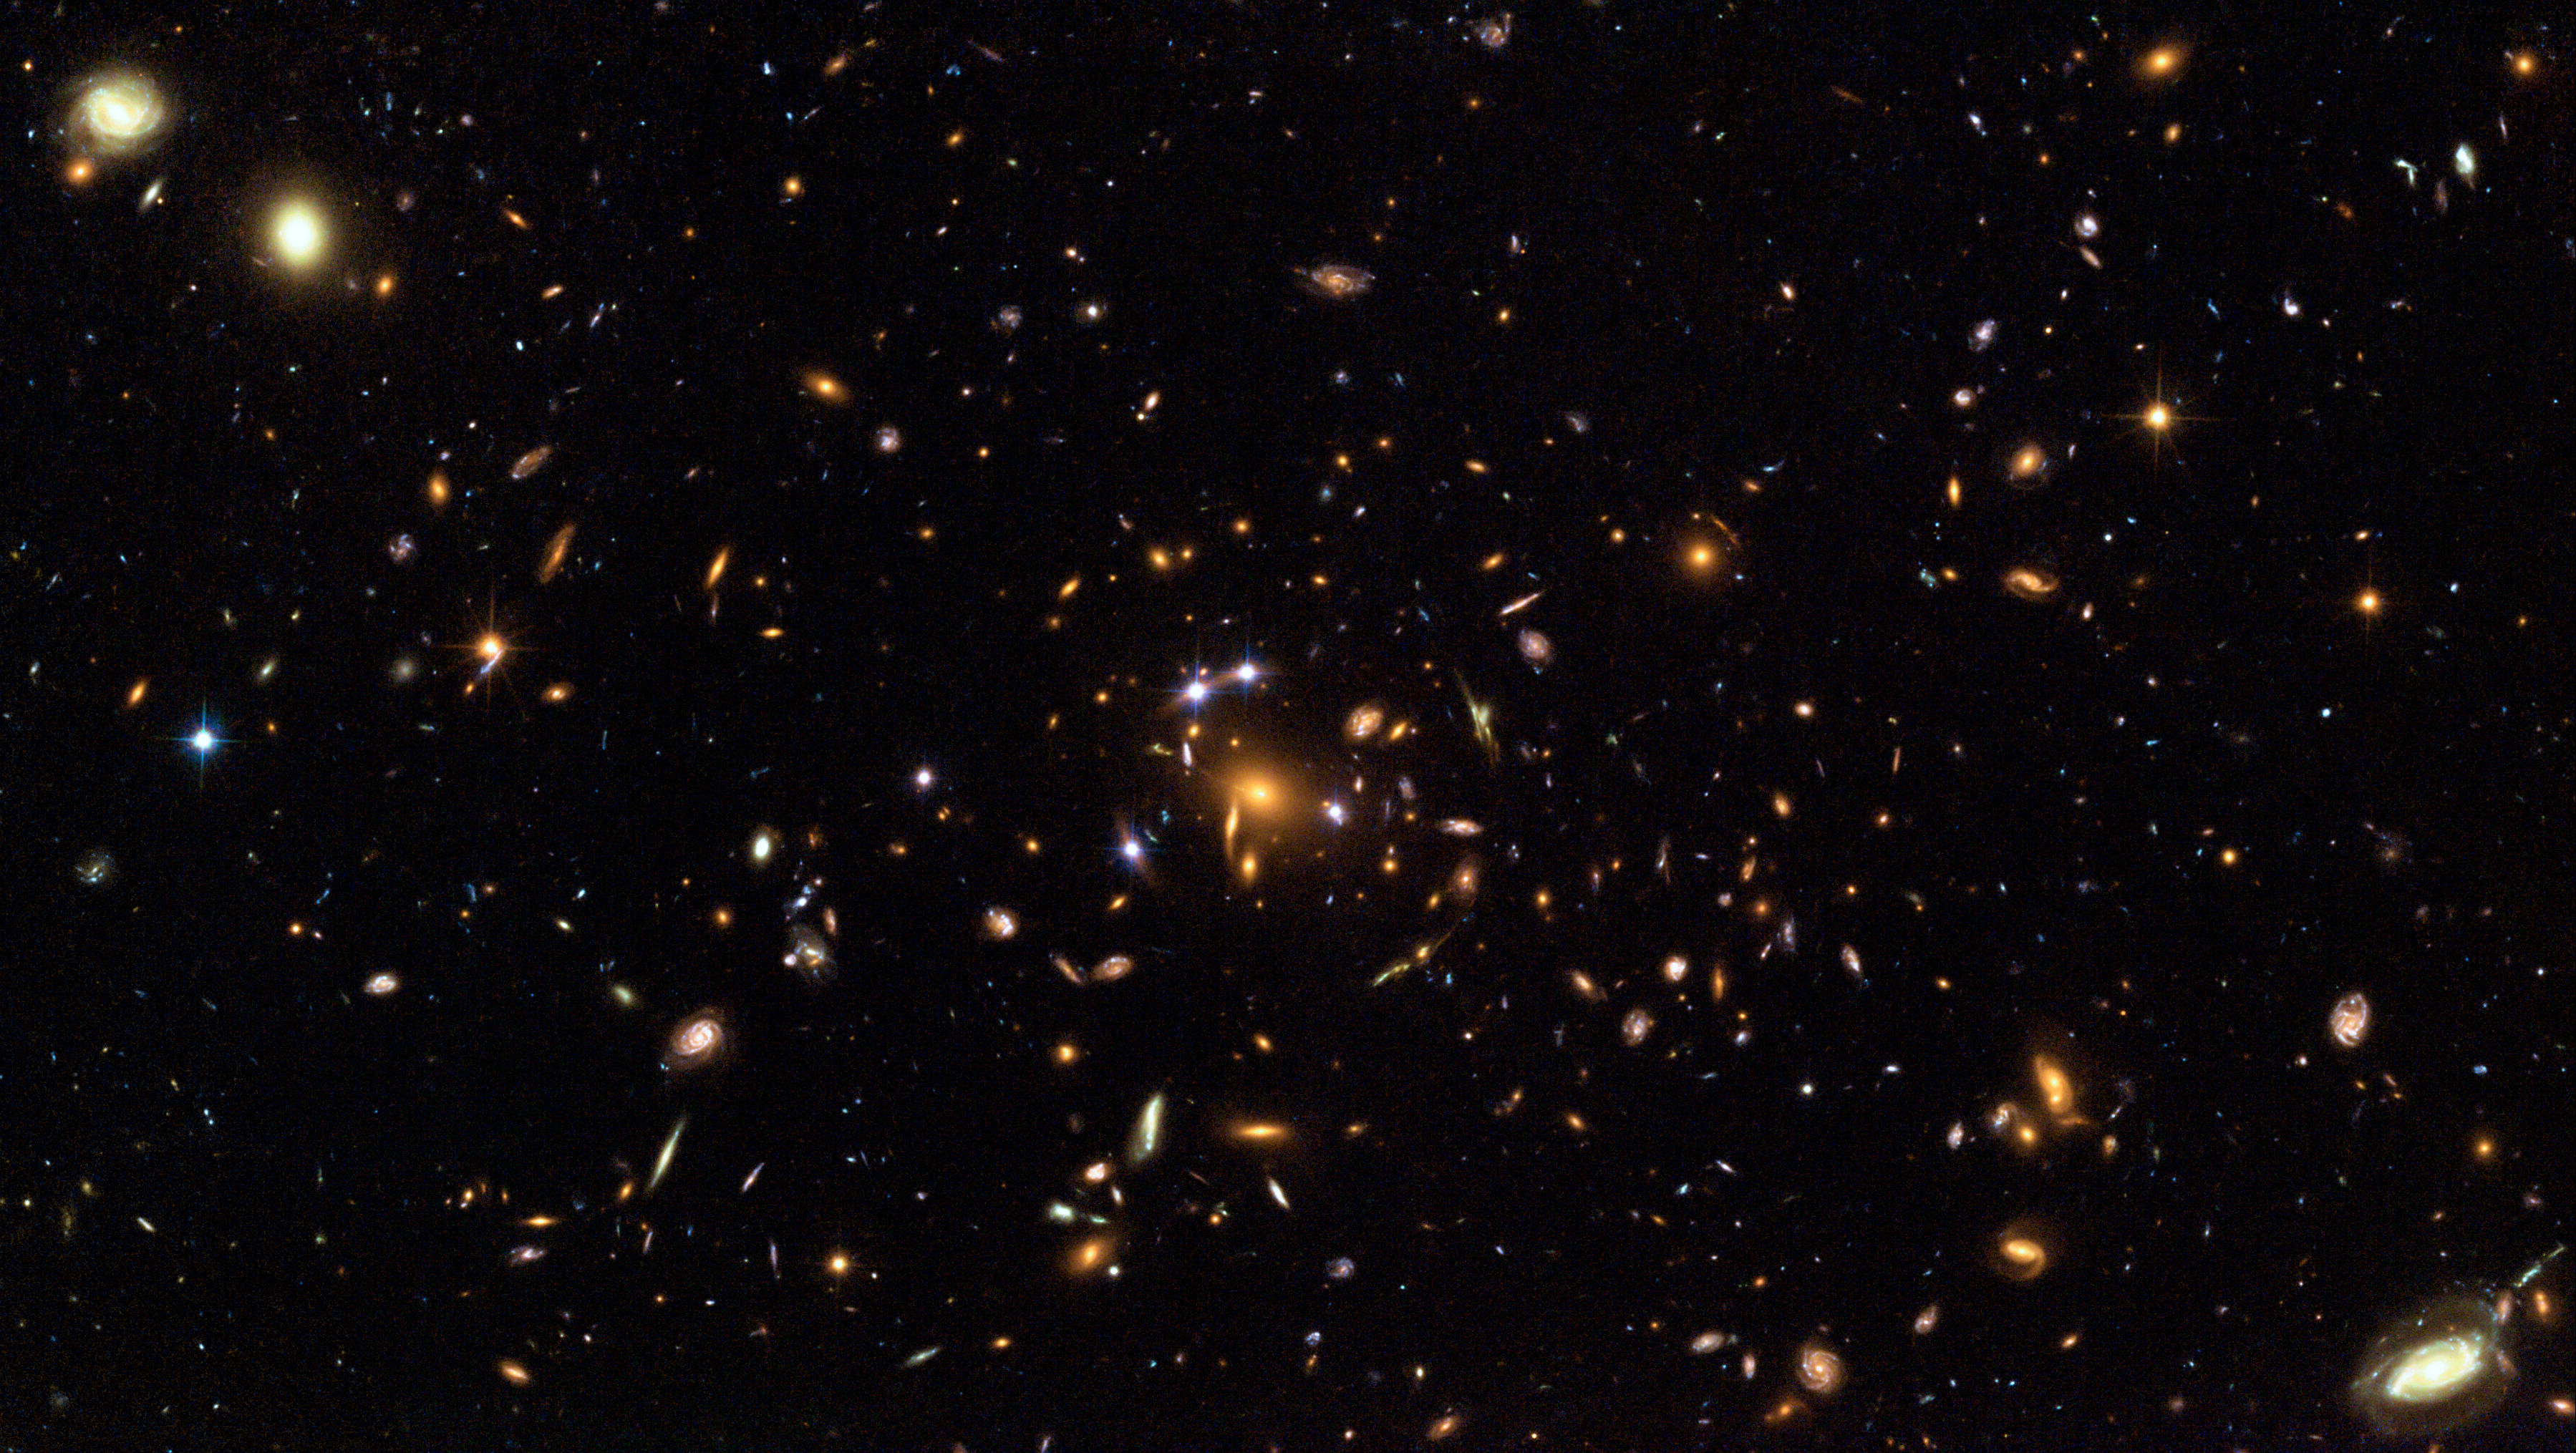

Hubble captures a "five-star" rated gravitational lens

This full-size Hubble image shows galaxy cluster SDSS J1004+4112 that was discovered as part of the Sloan Digital Sky Survey. It is one of the more distant clusters known (seven billion light-years, redshift z=0.68), and is seen when the Universe was half its present age. The image is the first-ever picture of a single distant quasar lensed into five images and also shows a rich abundance of banana-like arcs from lends background galaxies and even a supernova. Four of the five quasar images are seen as star-like images surrounding the centre of the cluster. The fifth quasar image is embedded to the right of the core of the central galaxy in the cluster.

Credit: European Space Agency, NASA, Keren Sharon (Tel-Aviv University) and Eran Ofek (CalTech)